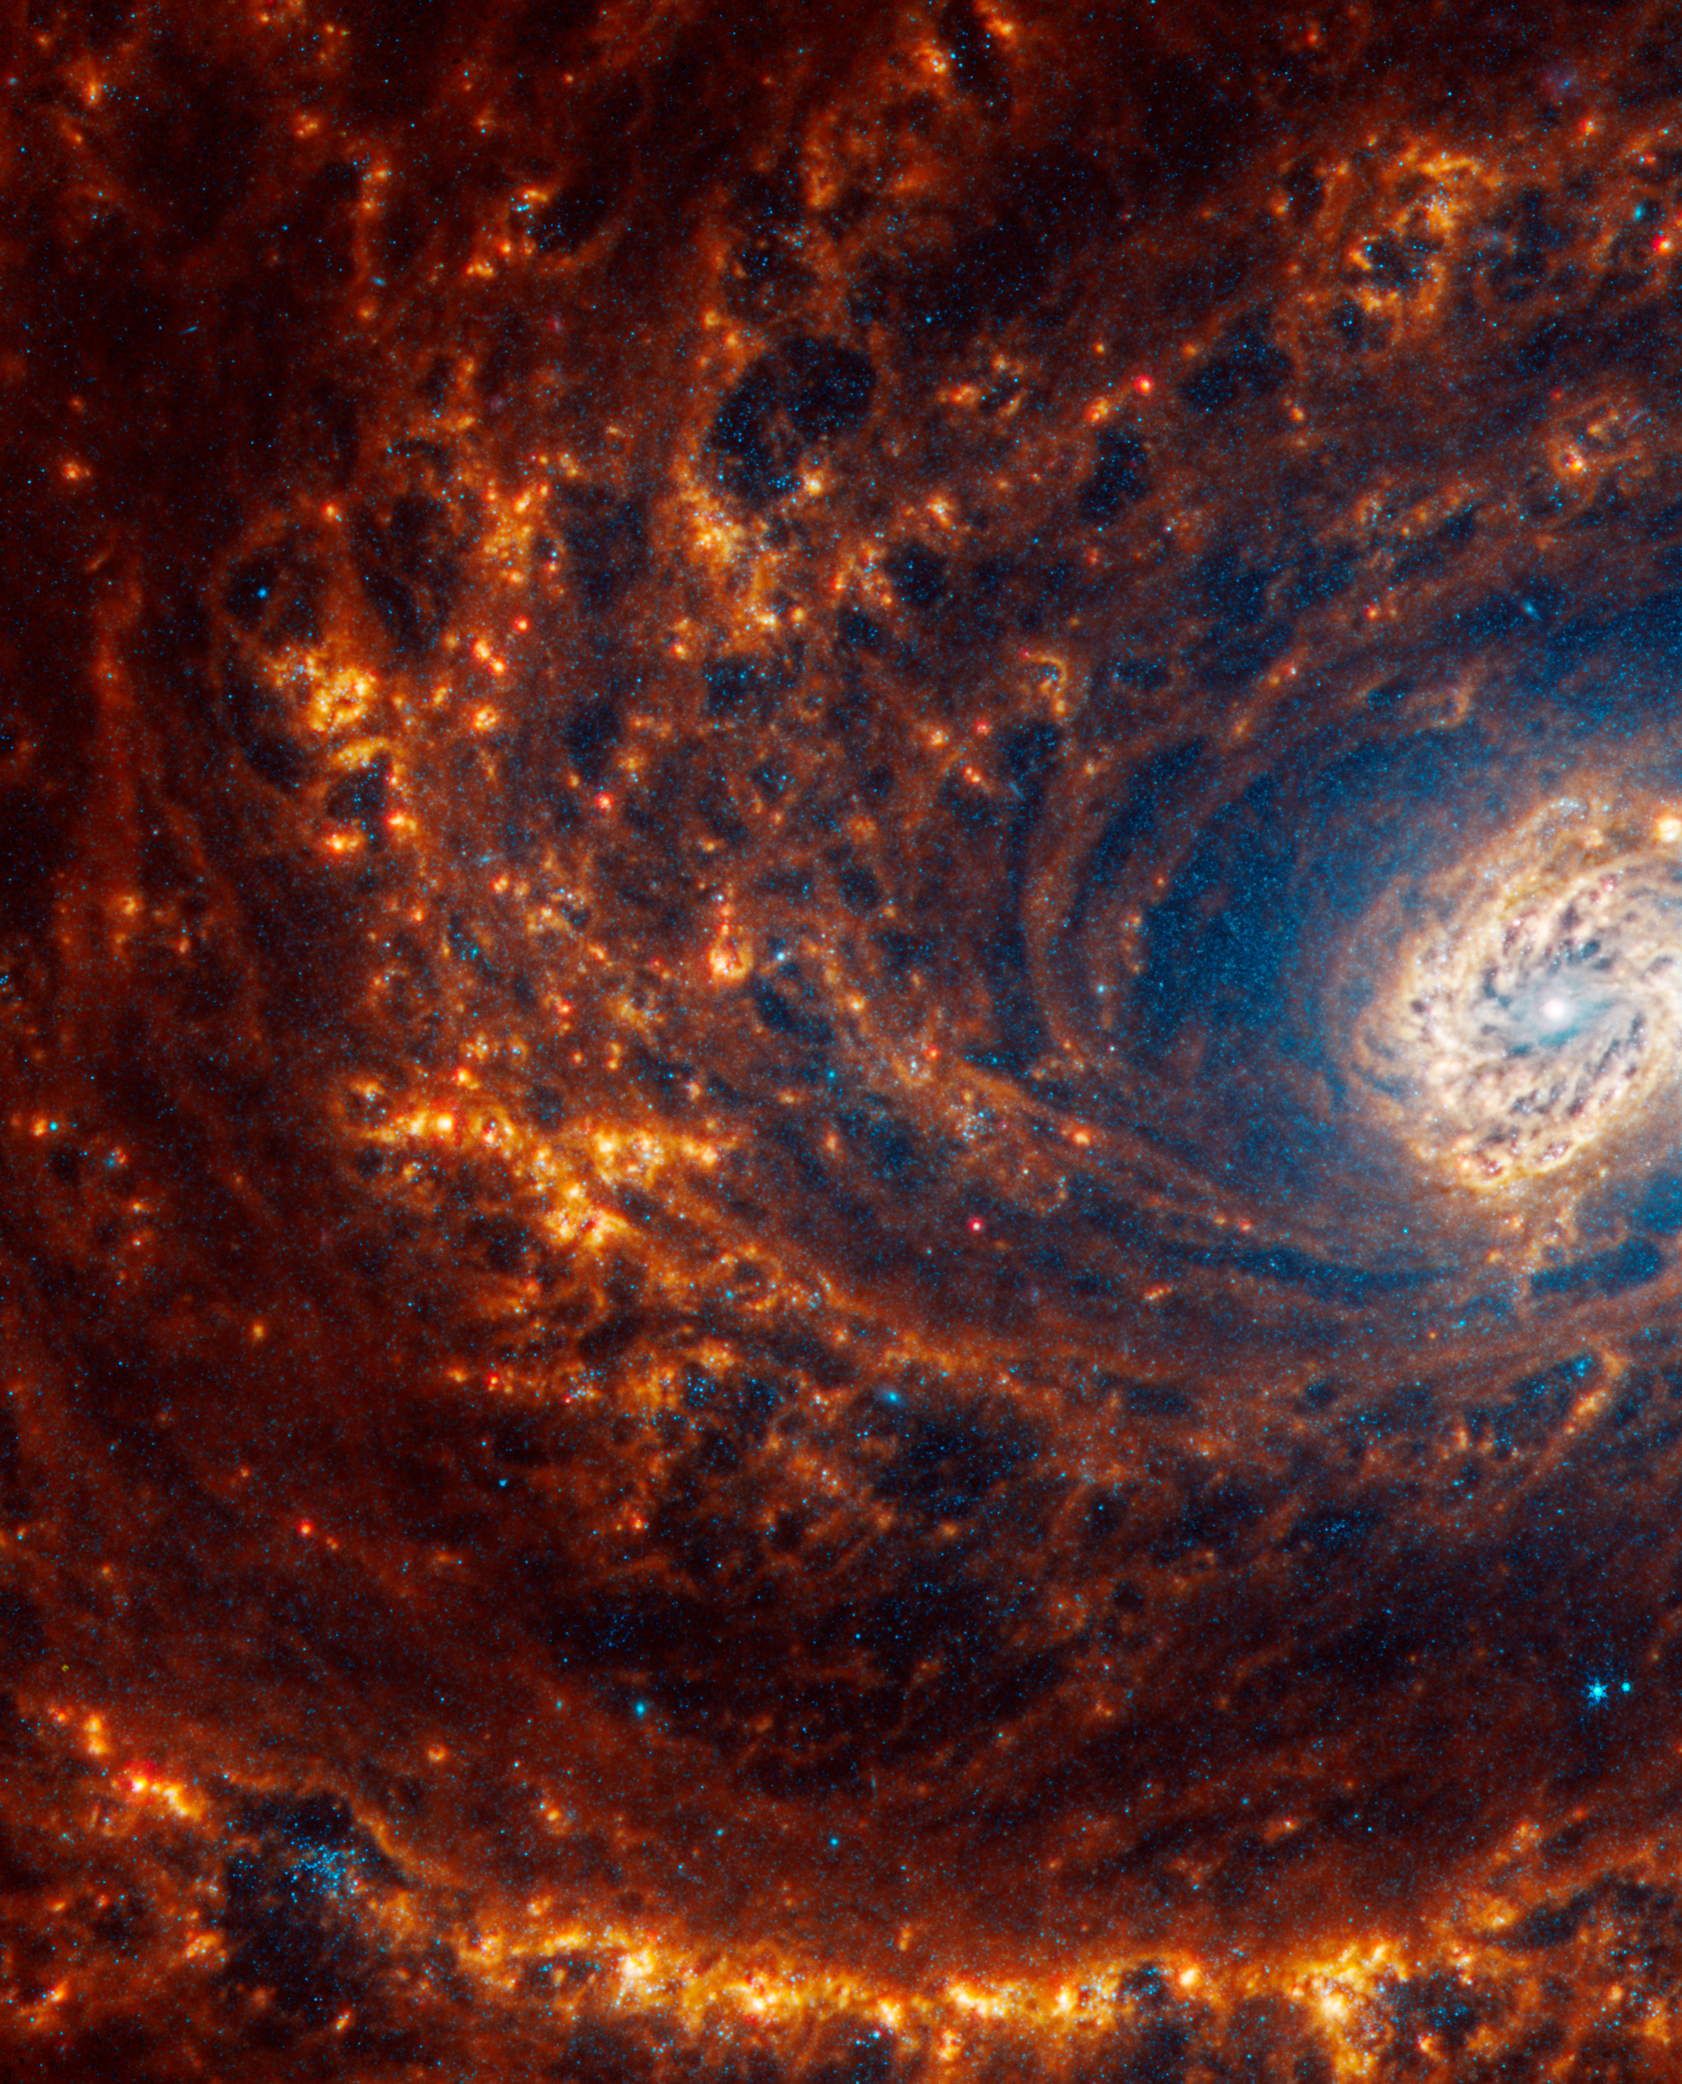

NGC 4321

This spiral galaxy was observed as part of the Physics at High Angular resolution in Nearby GalaxieS (PHANGS) program, a large project that includes observations from several space- and ground-based telescopes of many galaxies to help researchers study all phases of the star formation cycle, from the formation of stars within dusty gas clouds to the energy released in the process that creates the intricate structures revealed by Webb’s new images.

NGC 4321 is 56 million light-years away in the constellation Coma Berenices.

Learn more about what can be seen in this vast collection of Webb images here.

Credit: NASA, ESA, CSA, STScI, J. Lee (STScI), T. Williams (Oxford), PHANGS Team